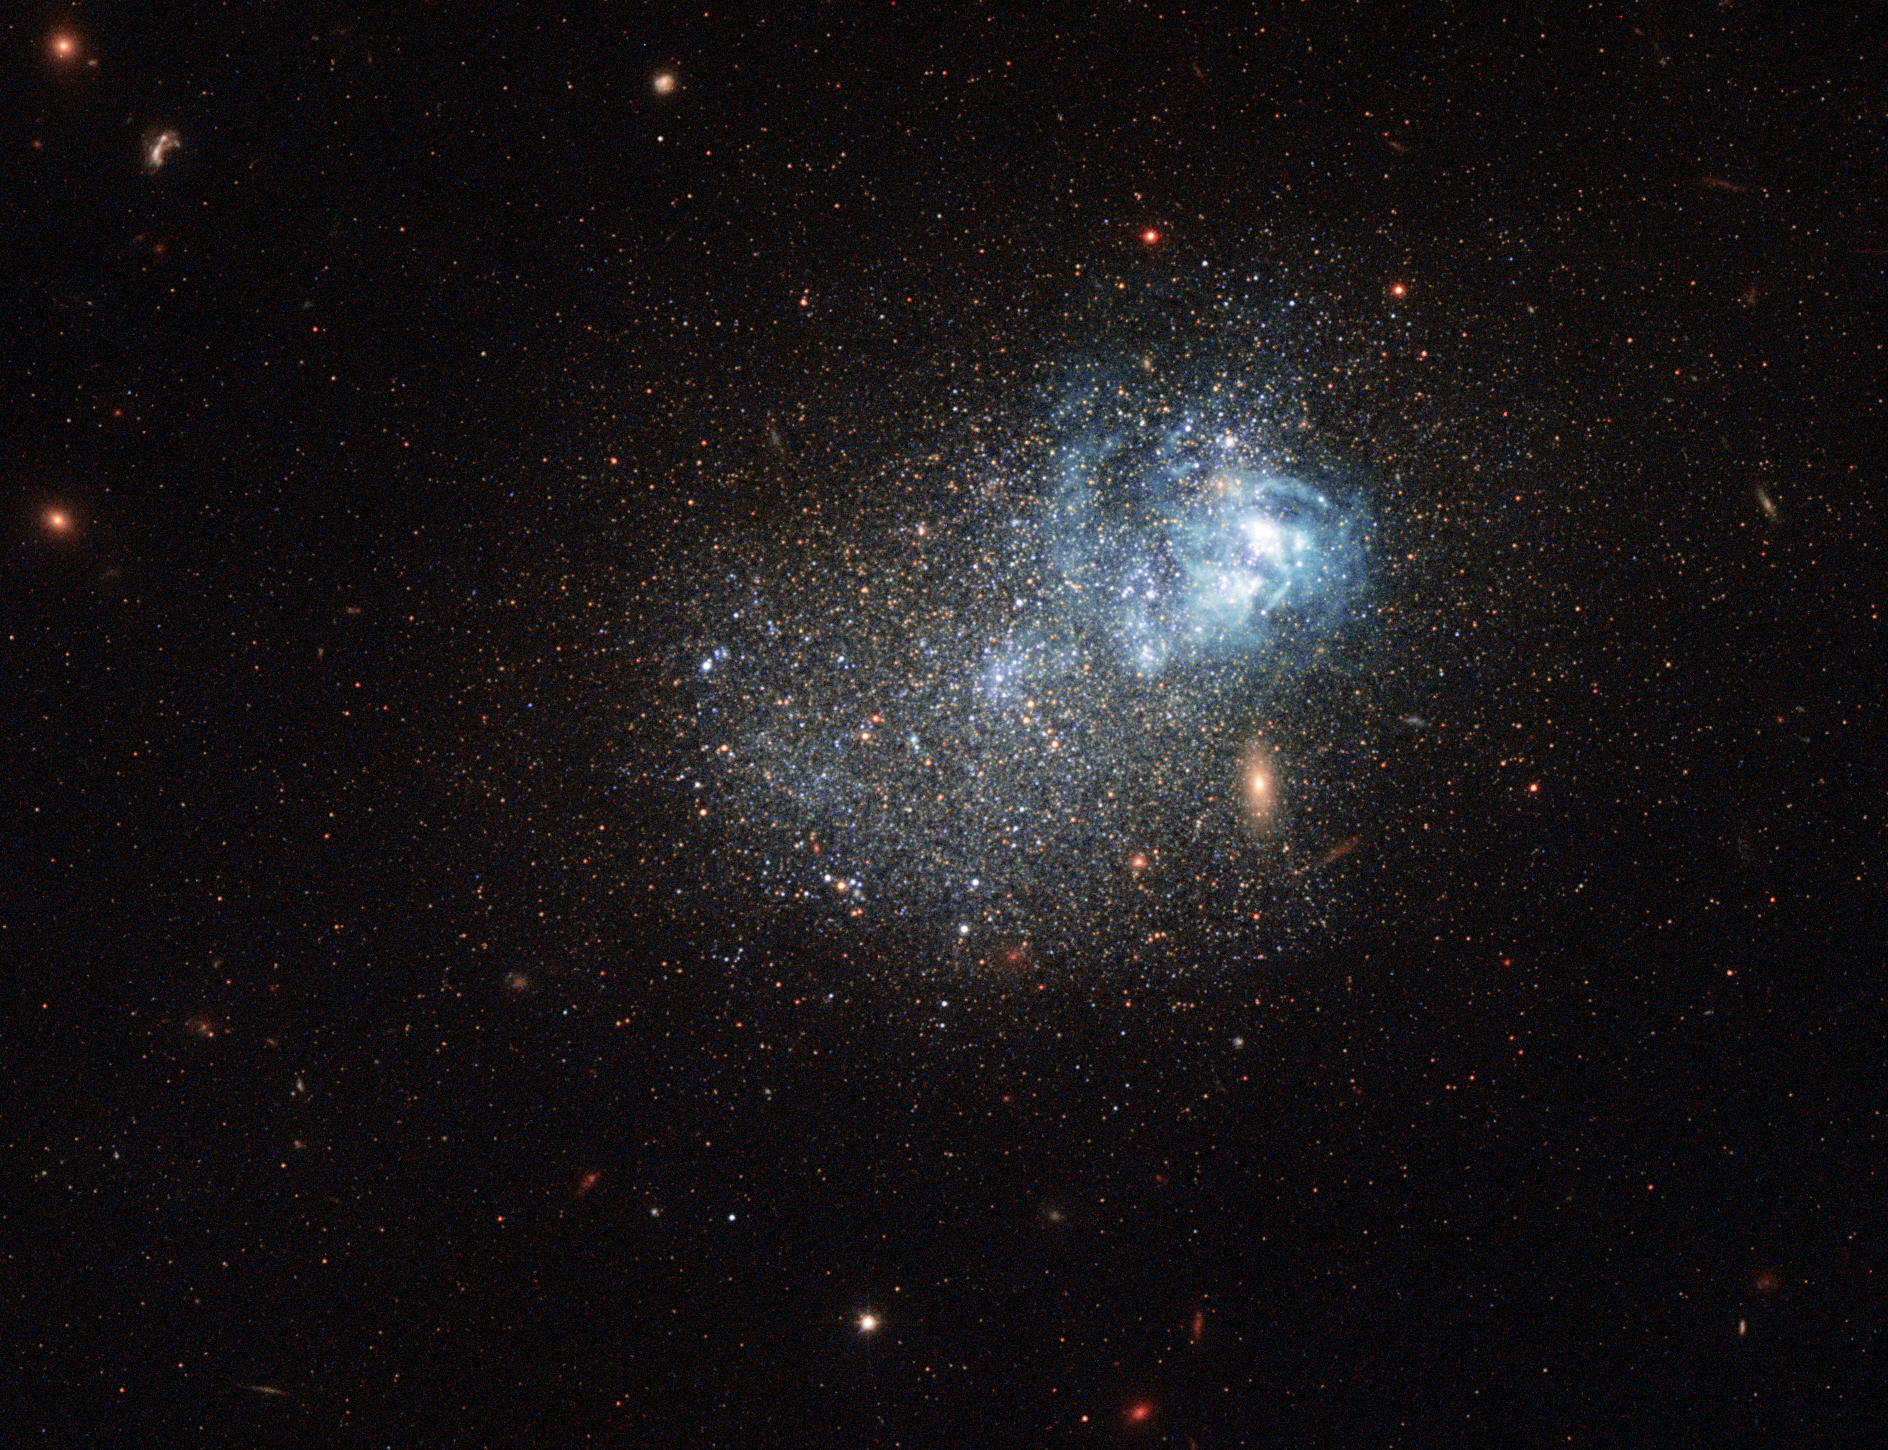

A messy star factory

This sprinkle of cosmic glitter is a blue compact dwarf galaxy known as Markarian 209. Galaxies of this type are blue-hued, compact in size, gas-rich, and low in heavy elements. They are often used by astronomers to study star formation, as their conditions are similar to those thought to exist in the early Universe.

Markarian 209 in particular has been studied extensively. It is filled with diffuse gas and peppered with star-forming regions towards its core. This image captures it undergoing a particularly dramatic burst of star formation, visible as the lighter blue cloudy region towards the top right of the galaxy. This clump is filled with very young and hot newborn stars.

This galaxy was initially thought to be a young galaxy undergoing its very first episode of star formation, but later research showed that Markarian 209 is actually very old, with an almost continuous history of forming new stars. It is thought to have never had a dormant period — a period during which no stars were formed — lasting longer than 100 million years.

The dominant population of stars in Markarian 209 is still quite young, in stellar terms, with ages of under 3 million years. For comparison, the Sun is some 4.6 billion years old, and is roughly halfway through its expected lifespan.

The observations used to make this image were taken using Hubble’s Wide Field Camera 3 and Advanced Camera for Surveys, and span the ultraviolet, visible, and infrared parts of the spectrum. A scattering of other bright galaxies can be seen across the frame, including the bright golden oval that could, due to a trick of perspective, be mistaken as part of Markarian 209 but is in fact a background galaxy.

A version of this image was entered into the Hubble's Hidden Treasures image processing competition by contestant Nick Rose.

Credit: ESA/Hubble & NASA Acknowledgement: Nick Rose